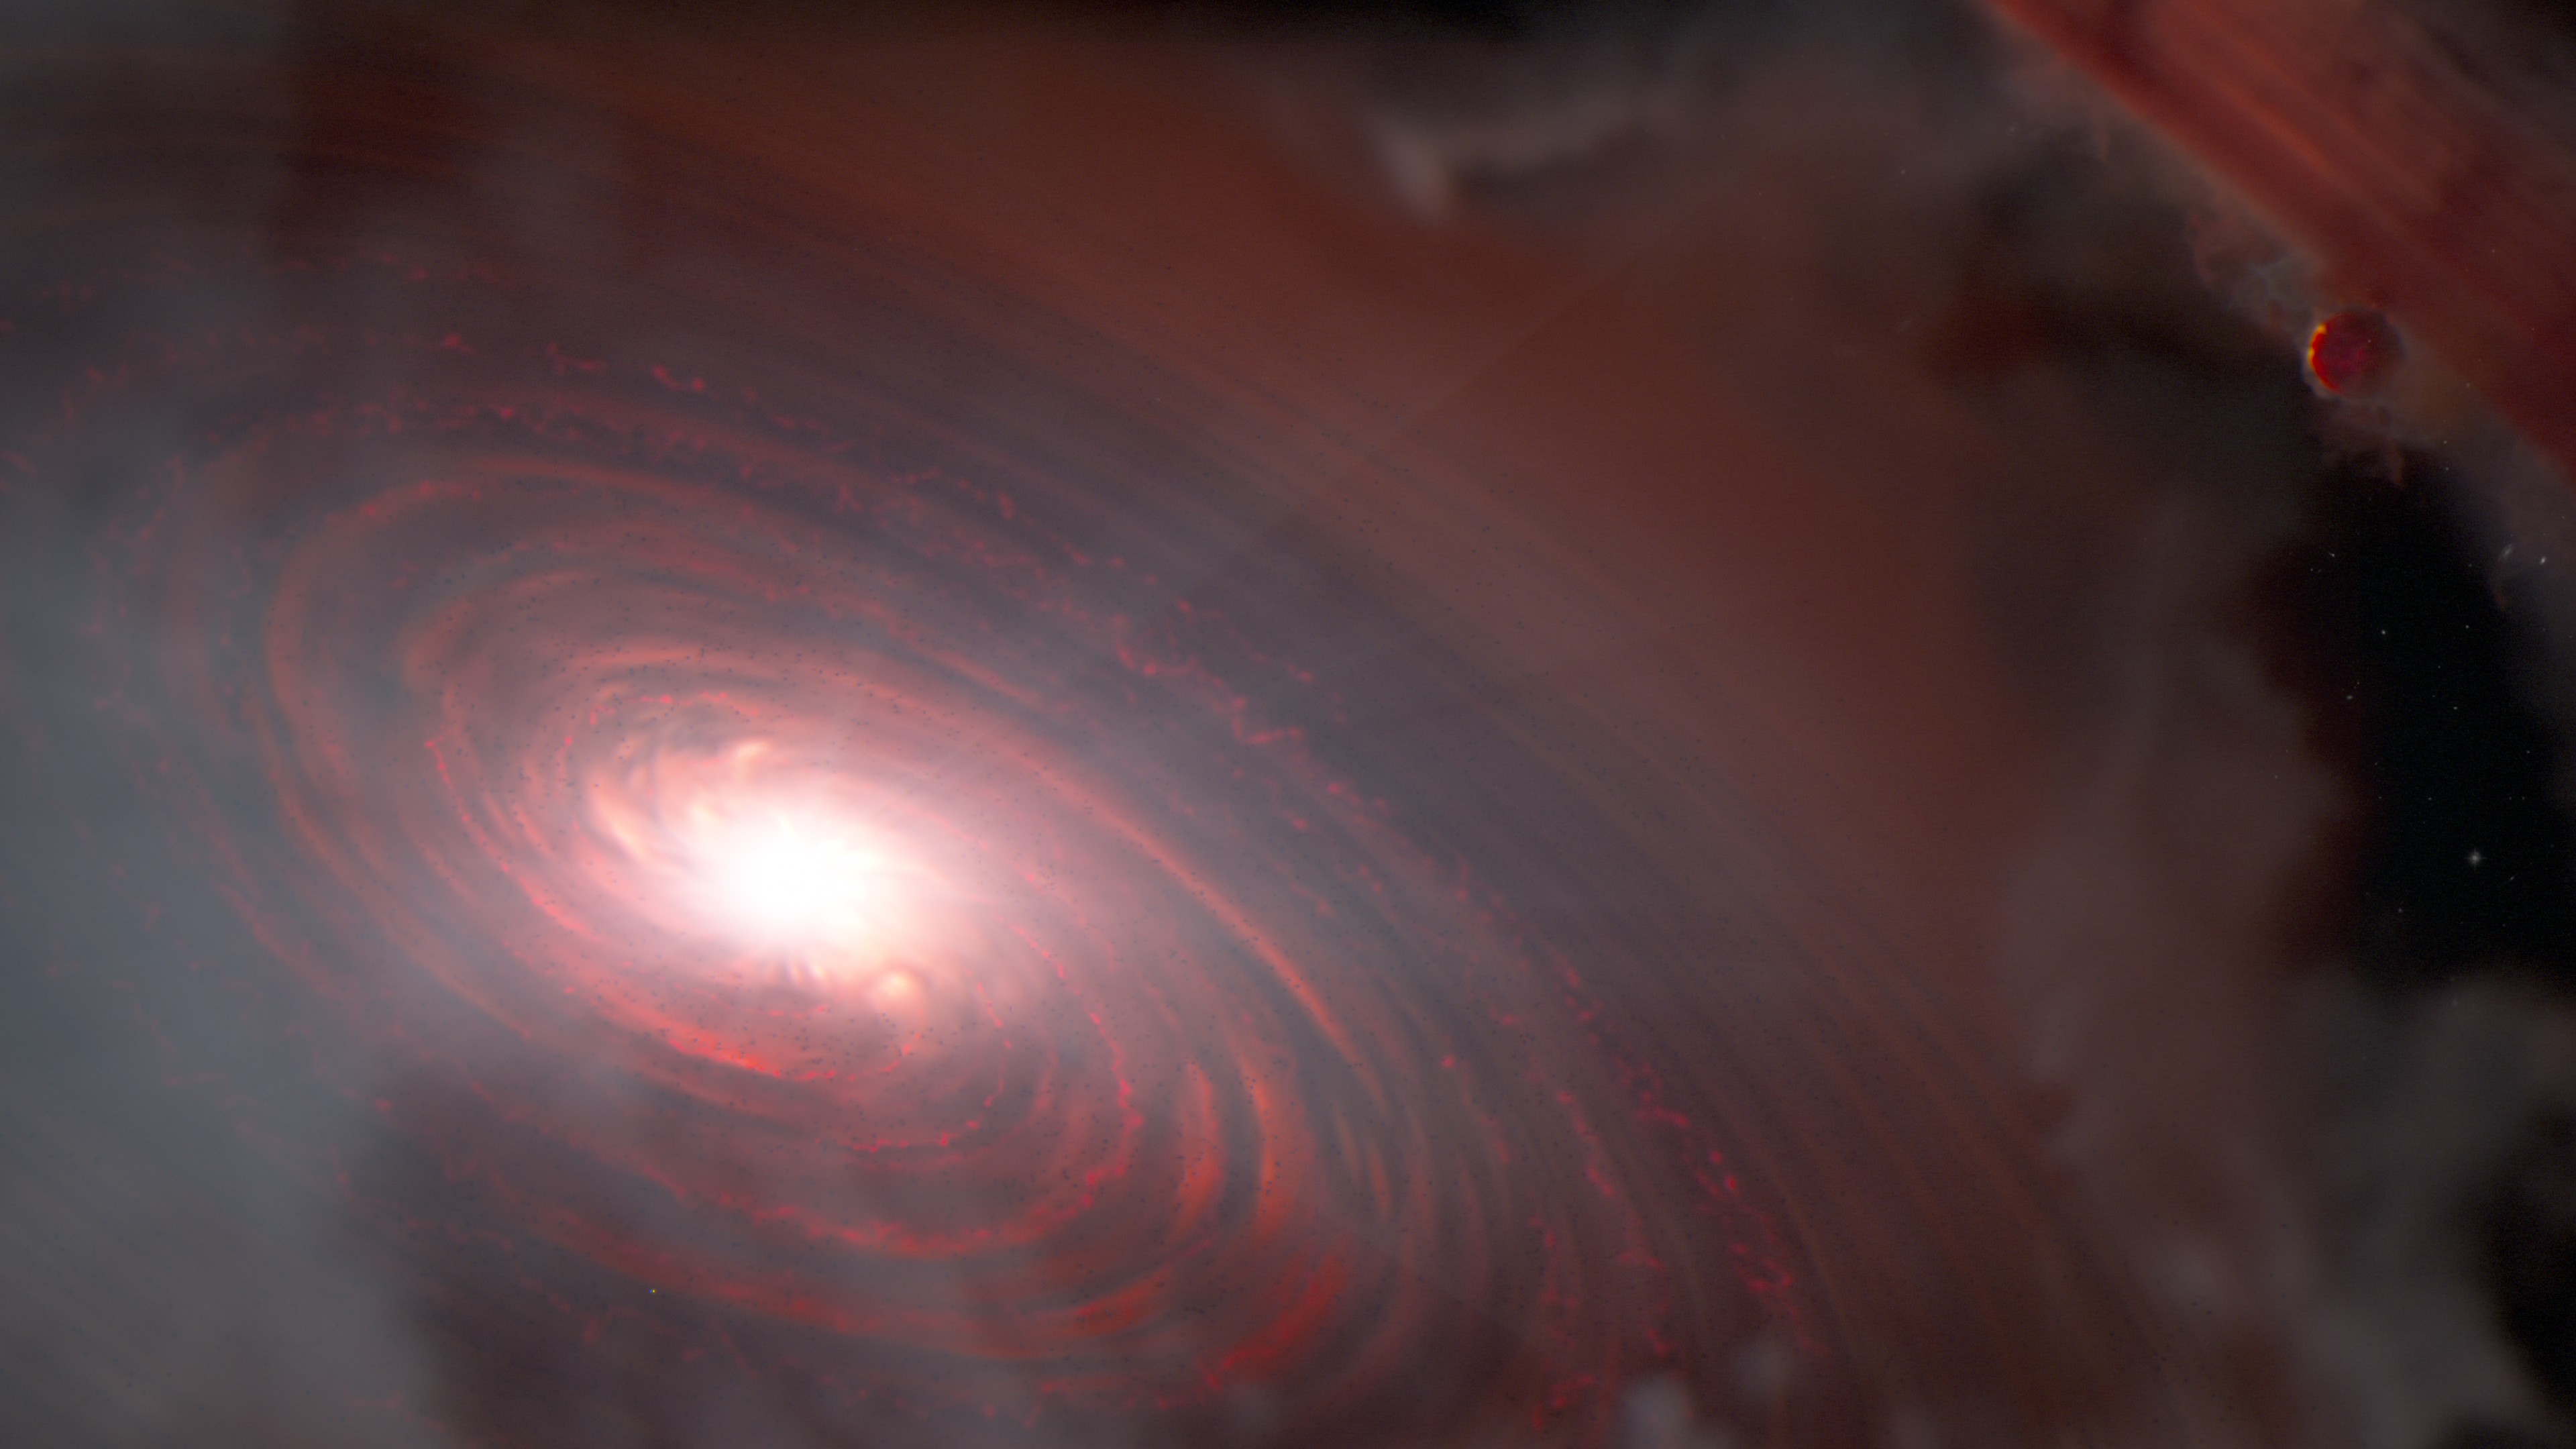

PDS 70 (artist concept)

This artist concept portrays the star PDS 70 and its inner protoplanetary disc. New measurements from the NASA/ESA/CSA James Webb Space Telescope’s Mid-InfraRed Instrument (MIRI) have indicated the presence of water vapour in the inner disc of the system PDS 70, located 370 light-years away. This is the first detection of water in the terrestrial region of a disc already known to host two or more protoplanets, one of which is shown at upper right.

Credit: NASA, ESA, CSA, J. Olmsted (STScI)